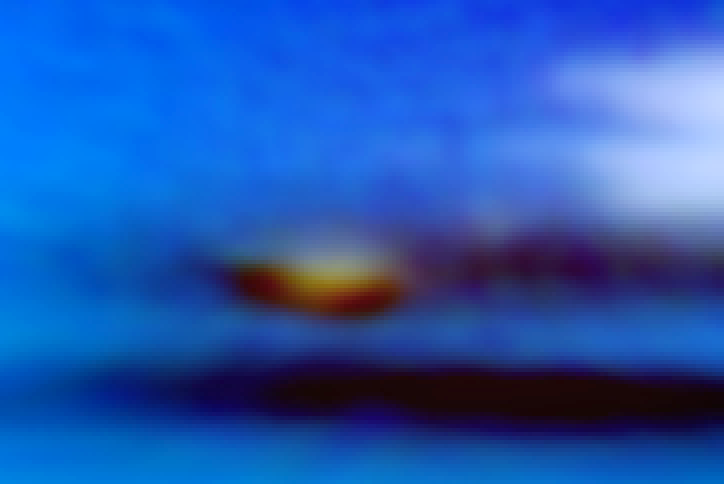

Full colour Neptune global map from Hubble's OPAL programme (dark spot and companion clouds closeup)

This new image taken with the NASA/ESA Hubble Space Telescope confirms the presence of a dark vortex in the atmosphere of Neptune. The full visible-light image shows that the dark feature resides near and below a patch of bright clouds in the planet's southern hemisphere. The dark spot measures roughly 4,800 kilometers across.

The full-colour image is a close-up of the complex feature. Pancake-shaped clouds above the spot form when ambient air is perturbed and diverted upward over the vortex. The vortex is a high-pressure system.

Credit: NASA, ESA, and M.H. Wong and J. Tollefson (UC Berkeley)